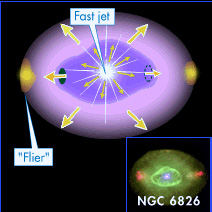

NGC 6826 illustration

Garden-variety stars like our Sun live undistinguished lives in their galactic neighborhoods, churning out heat and light for billions of years. When these stars reach retirement age, however, they become unique and colorful works of art.

As ordinary, sun-like stars begin their 30,000-year journey into their twilight years, they swell and glow, shrugging off their gaseous layers until only their small, hot cores remain. The ejected gaseous layers are called planetary nebulae, so named in the 18th century because, through small telescopes, these gas clouds had round shapes similar to distant planets such as Uranus or Neptune.

The gaseous debris glows like a fluorescent design, producing objects with striking shapes and names like "The Cat's Eye" and "The Hourglass." Astronomers have recorded more than 1,000 of them in our galaxy.

Gas released by these dying stars helps create new life. This gas contains new chemical elements, including carbon, which eventually are incorporated into stars and planets. Scientists believe that the carbon found on Earth came, in part, from planetary nebulae billions of years ago. (The rest came from supernova explosions.)

Credit: NASA & ESA